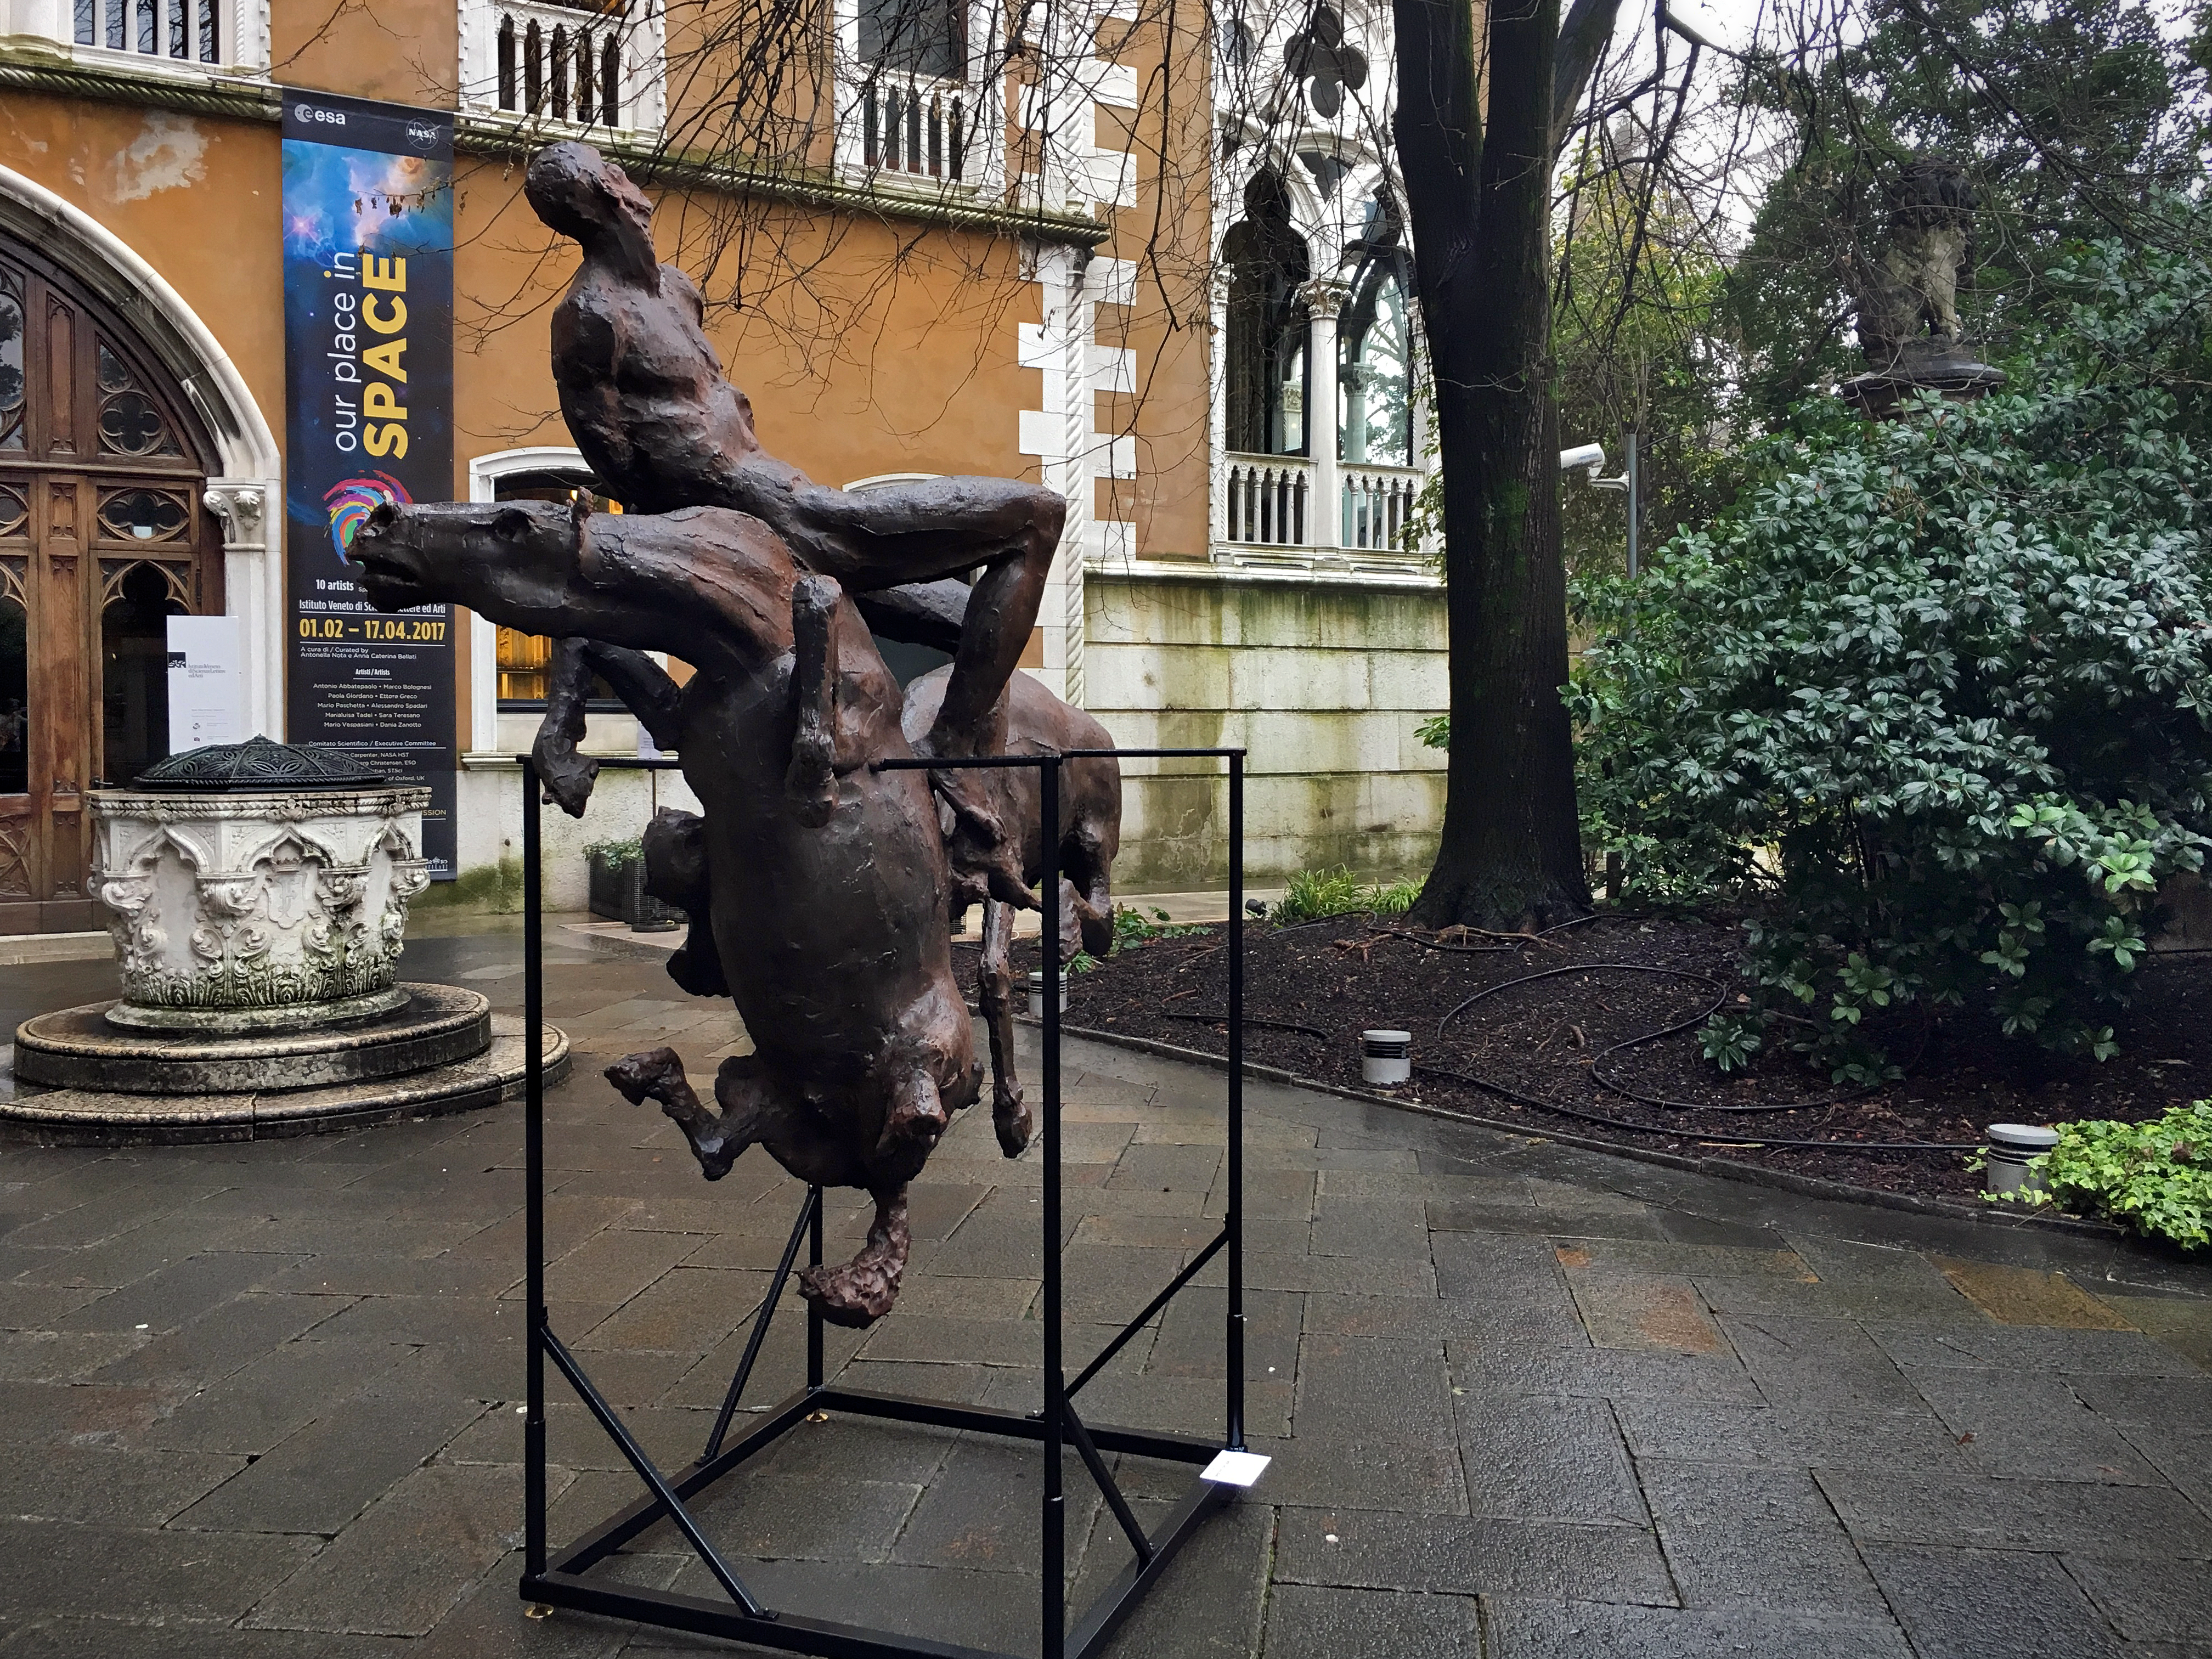

Our place in space apocalypse

The sculpture Apocalypse was created by artist Ettore Greco, and demonstrated the apocalyptic change happening in the second half of the 16th century: In that time the the heliocentric model — placing the Sun at the centre — overturned the geocentrism.

Credit: ESA/Hubble, Pam Jeffries